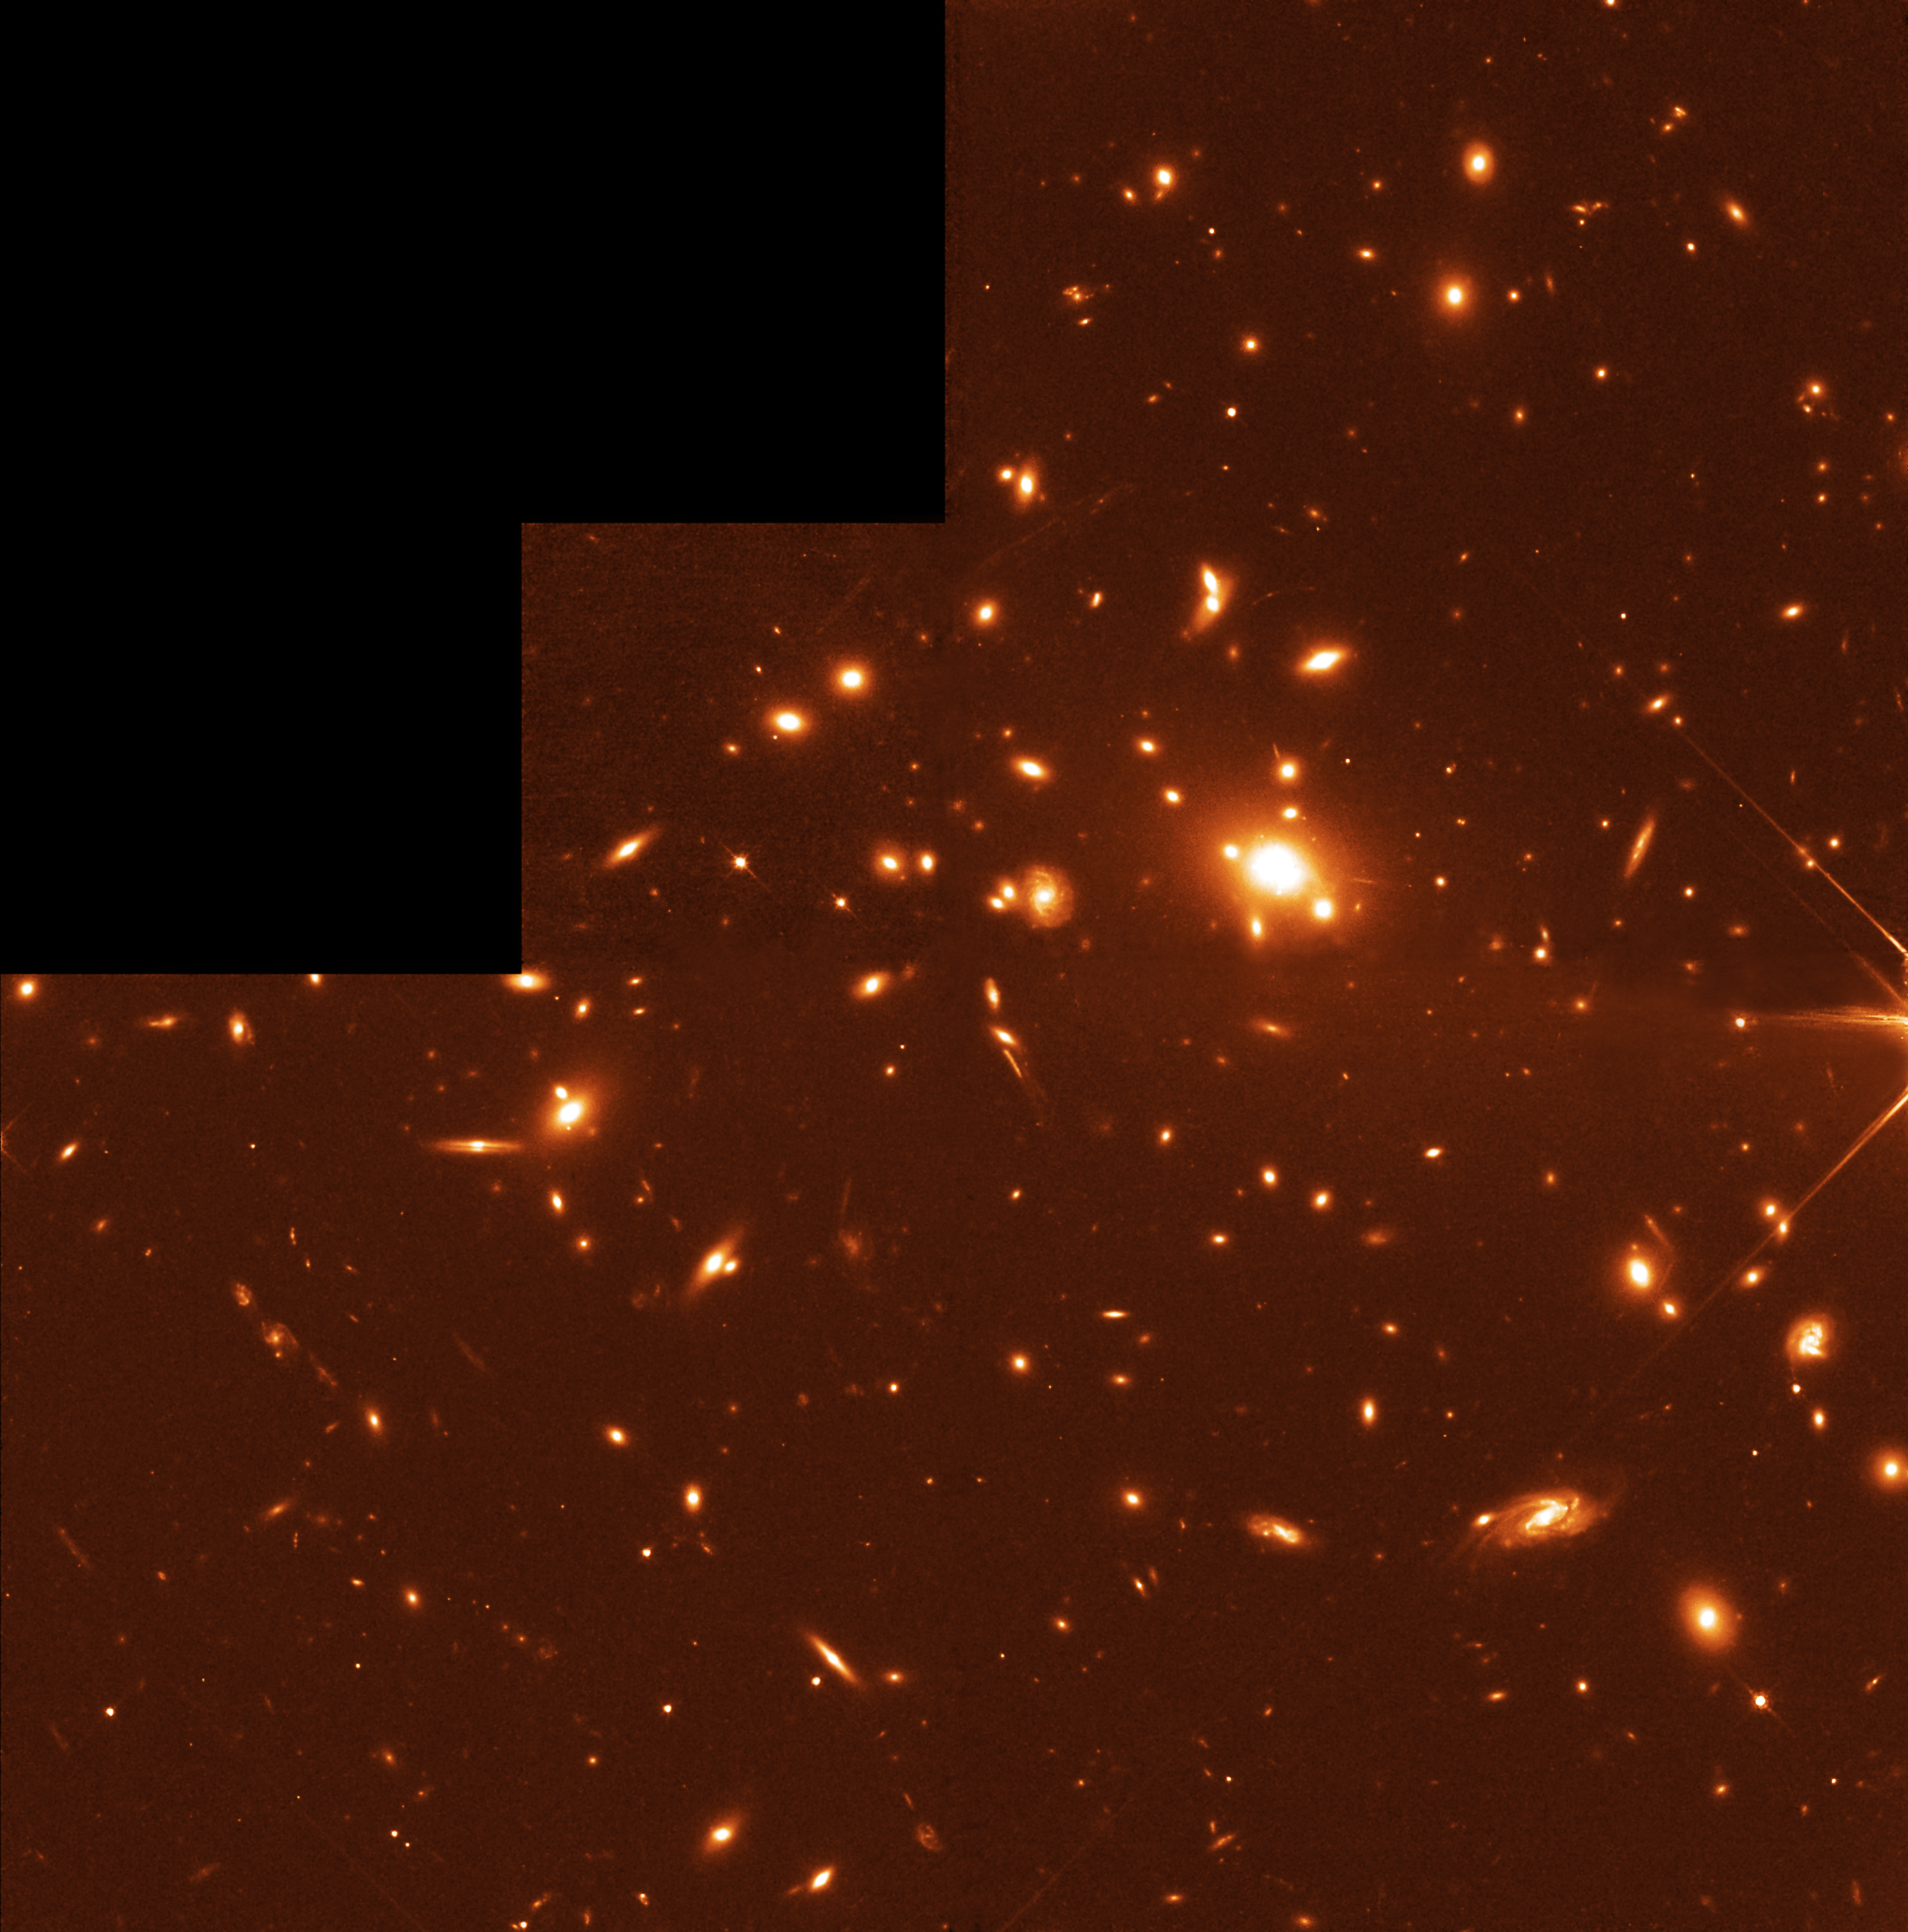

Galaxy Cluster Abell 1835

This NASA/ESA Hubble Space Telescope image was taken with the Wide Field and Planetary Camera 2 (WFPC2) in red light. The two hour exposure spans 2.5 arcminutes. The image shows an overview of the massive galaxy cluster Abell 1835 (right) which is acting as a gravitational telescope enhancing the light from background galaxies. The galaxy cluster is at a distance of 3.5 billion light years and numerous gravitational arcs can be seen in the image. In the centre of the cluster a massive giant elliptical galaxy is surrounded by several smaller ellipticals. The box indicates the galaxy SMM J14011+0252, also called J1/J2, which was first observed with the SCUBA (Sub-millimetre Common User Bolometer Array) instrument on the James Clerk Maxwell Telescope in Hawaii.

For further information, please click the news release link below.

Credit: ESA & Jean-Paul Kneib (Observatoire Midi-Pyrénées)